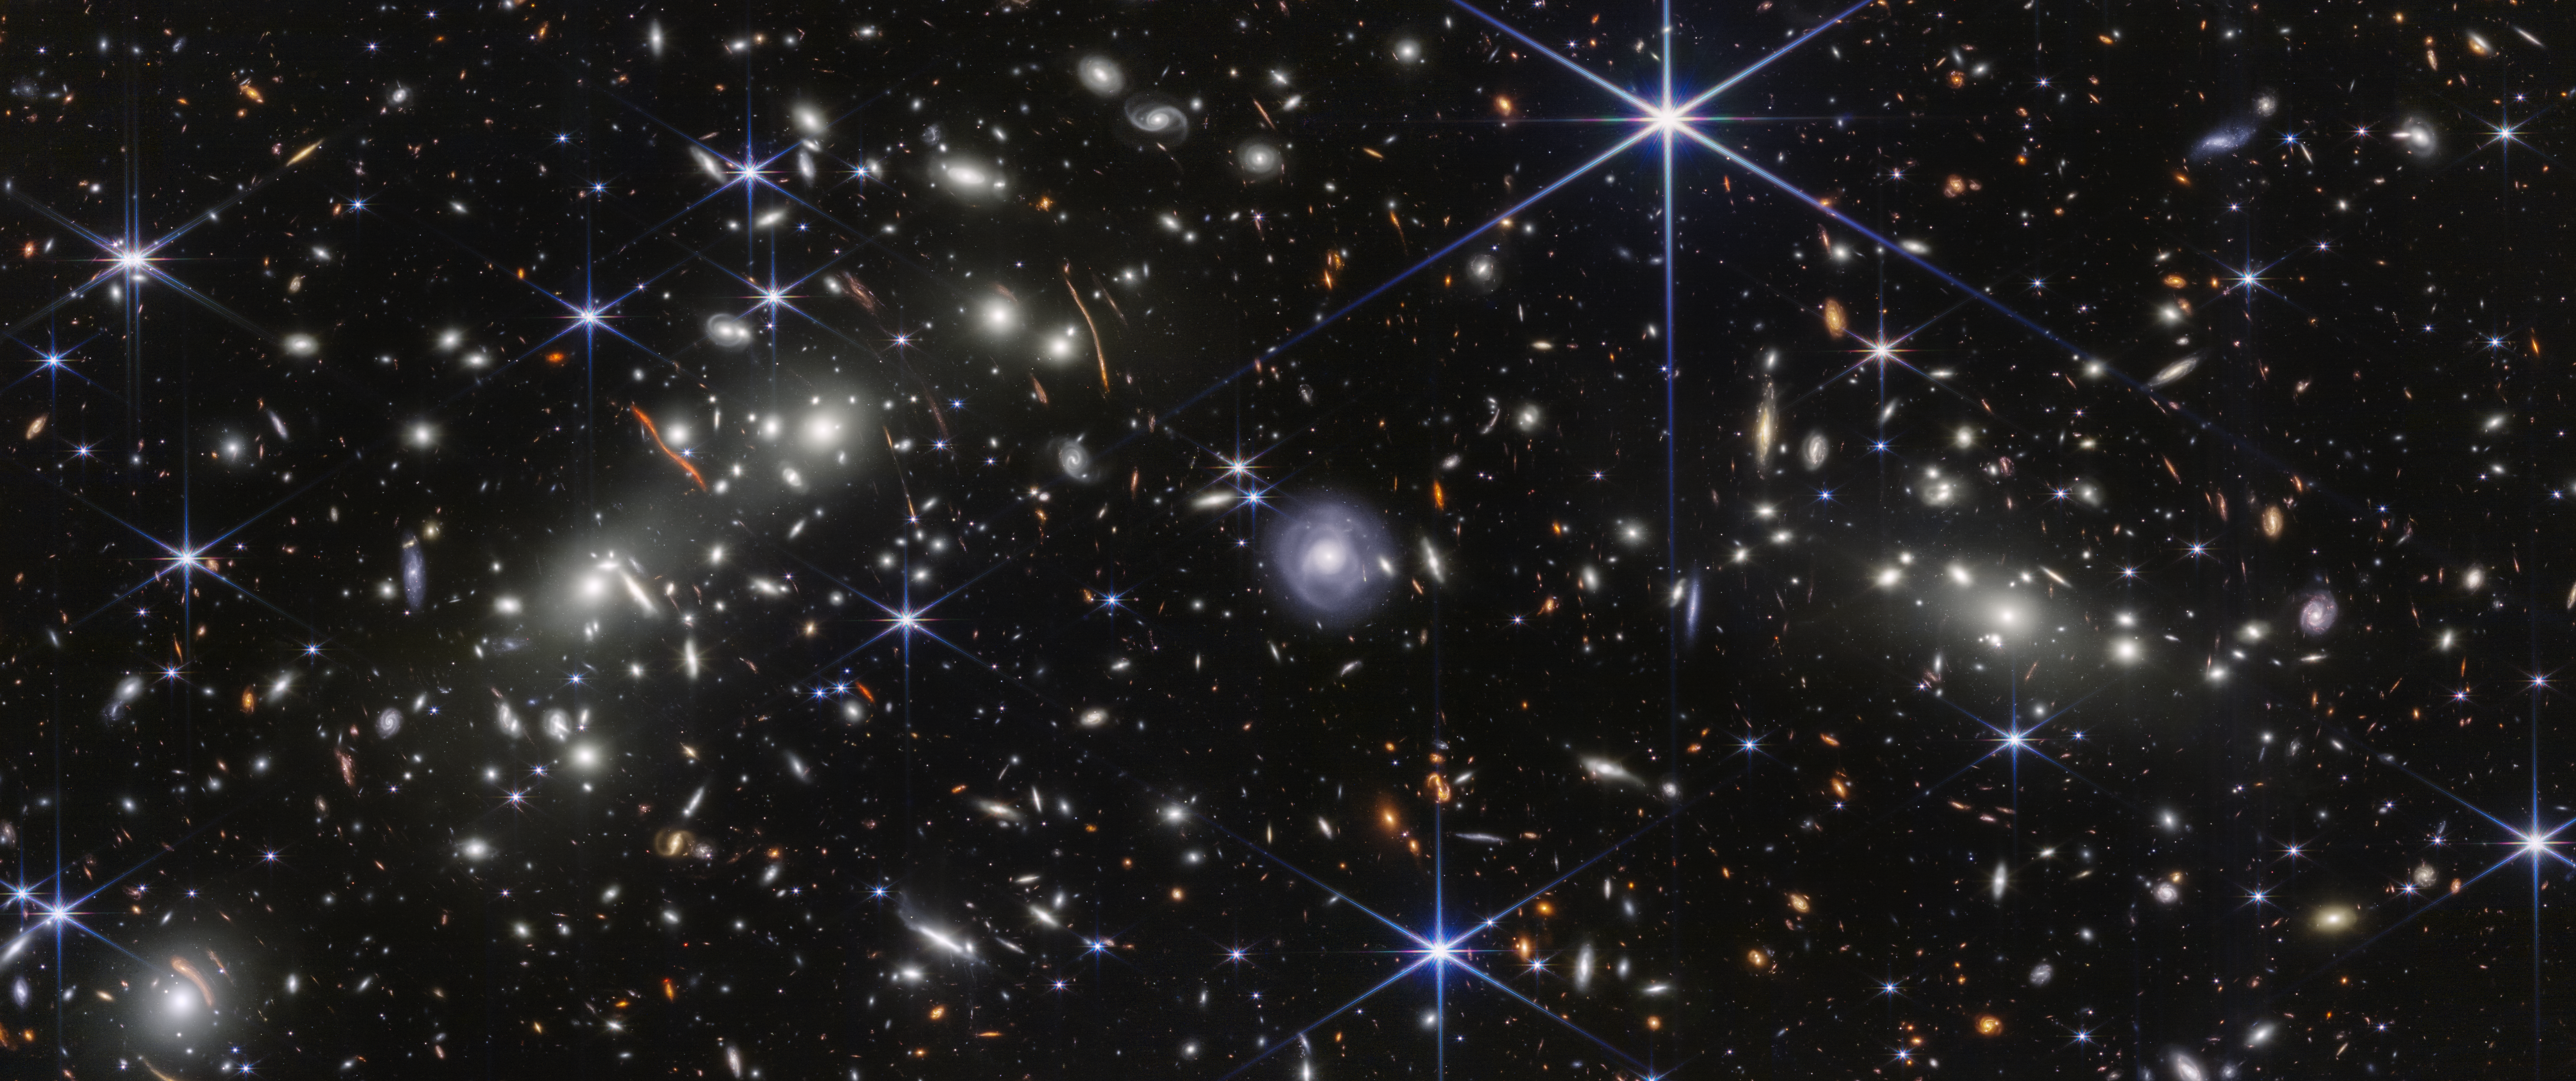

Bullet Cluster (NIRCam Image)

All galaxies are made up of stars, gas, dust, and dark matter, which are bound together by gravity. The Bullet Cluster is made up of two very massive collections of galaxies, known as galaxy clusters, that are themselves bound by gravity. This cluster is found in the Carina constellation 3.8 billion light-years from Earth.

The NASA/ESA/CSA James Webb Space Telescope captured the central region of the Bullet Cluster with its NIRCam (Near-Infrared Camera). The scene contains two massive galaxy clusters that sit on either side of the large, light blue spiral galaxy at the center. Webb’s extremely precise images revealed many more distant galaxies and faint objects, allowing a research team to refine the amount of mass in the two galaxy clusters.

The team measured thousands of galaxies in Webb’s images to accurately “weigh” both the visible and invisible mass in these galaxy clusters. They also carefully mapped and measured the collective light emitted by stars that are no longer bound to individual galaxies — known as intracluster stars. The team confirmed that the intracluster light can be a reliable tracer of dark matter, even in a highly dynamic environment like the Bullet Cluster. If these stars are not bound to galaxies, but to the cluster’s dark matter, it might become easier to pin down more specifics about the invisible matter. The researchers’ new measurements significantly refine what we know about how mass is spread throughout the Bullet Cluster. The galaxy cluster on the left has an asymmetric, elongated area of mass along the left edge of the blue region, which is a clue pointing to previous mergers in that cluster.

This image spans roughly 6.3 million light-years across. It was created with Webb data captured on 20 January 2025 from proposal #4598 (PI: M. Bradac). Several filters were used to sample specific wavelength ranges. The color results from assigning different hues (colors) to each monochromatic (grayscale) image associated with an individual filter. In this case, the assigned colors are: Blue: F090W, Cyan: F115W, Green: F150W, Yellow: F200W, Yellow: F277W, Orange: F356W, Red: F410M, Red: F444W

The results have been published in The Astrophysical Journal Letters.

Credit: NASA, ESA, CSA, STScI, J. Jee (Yonsei University, UC Davis), S. Cha (Yonsei University), K. Finner (Caltech/IPAC)